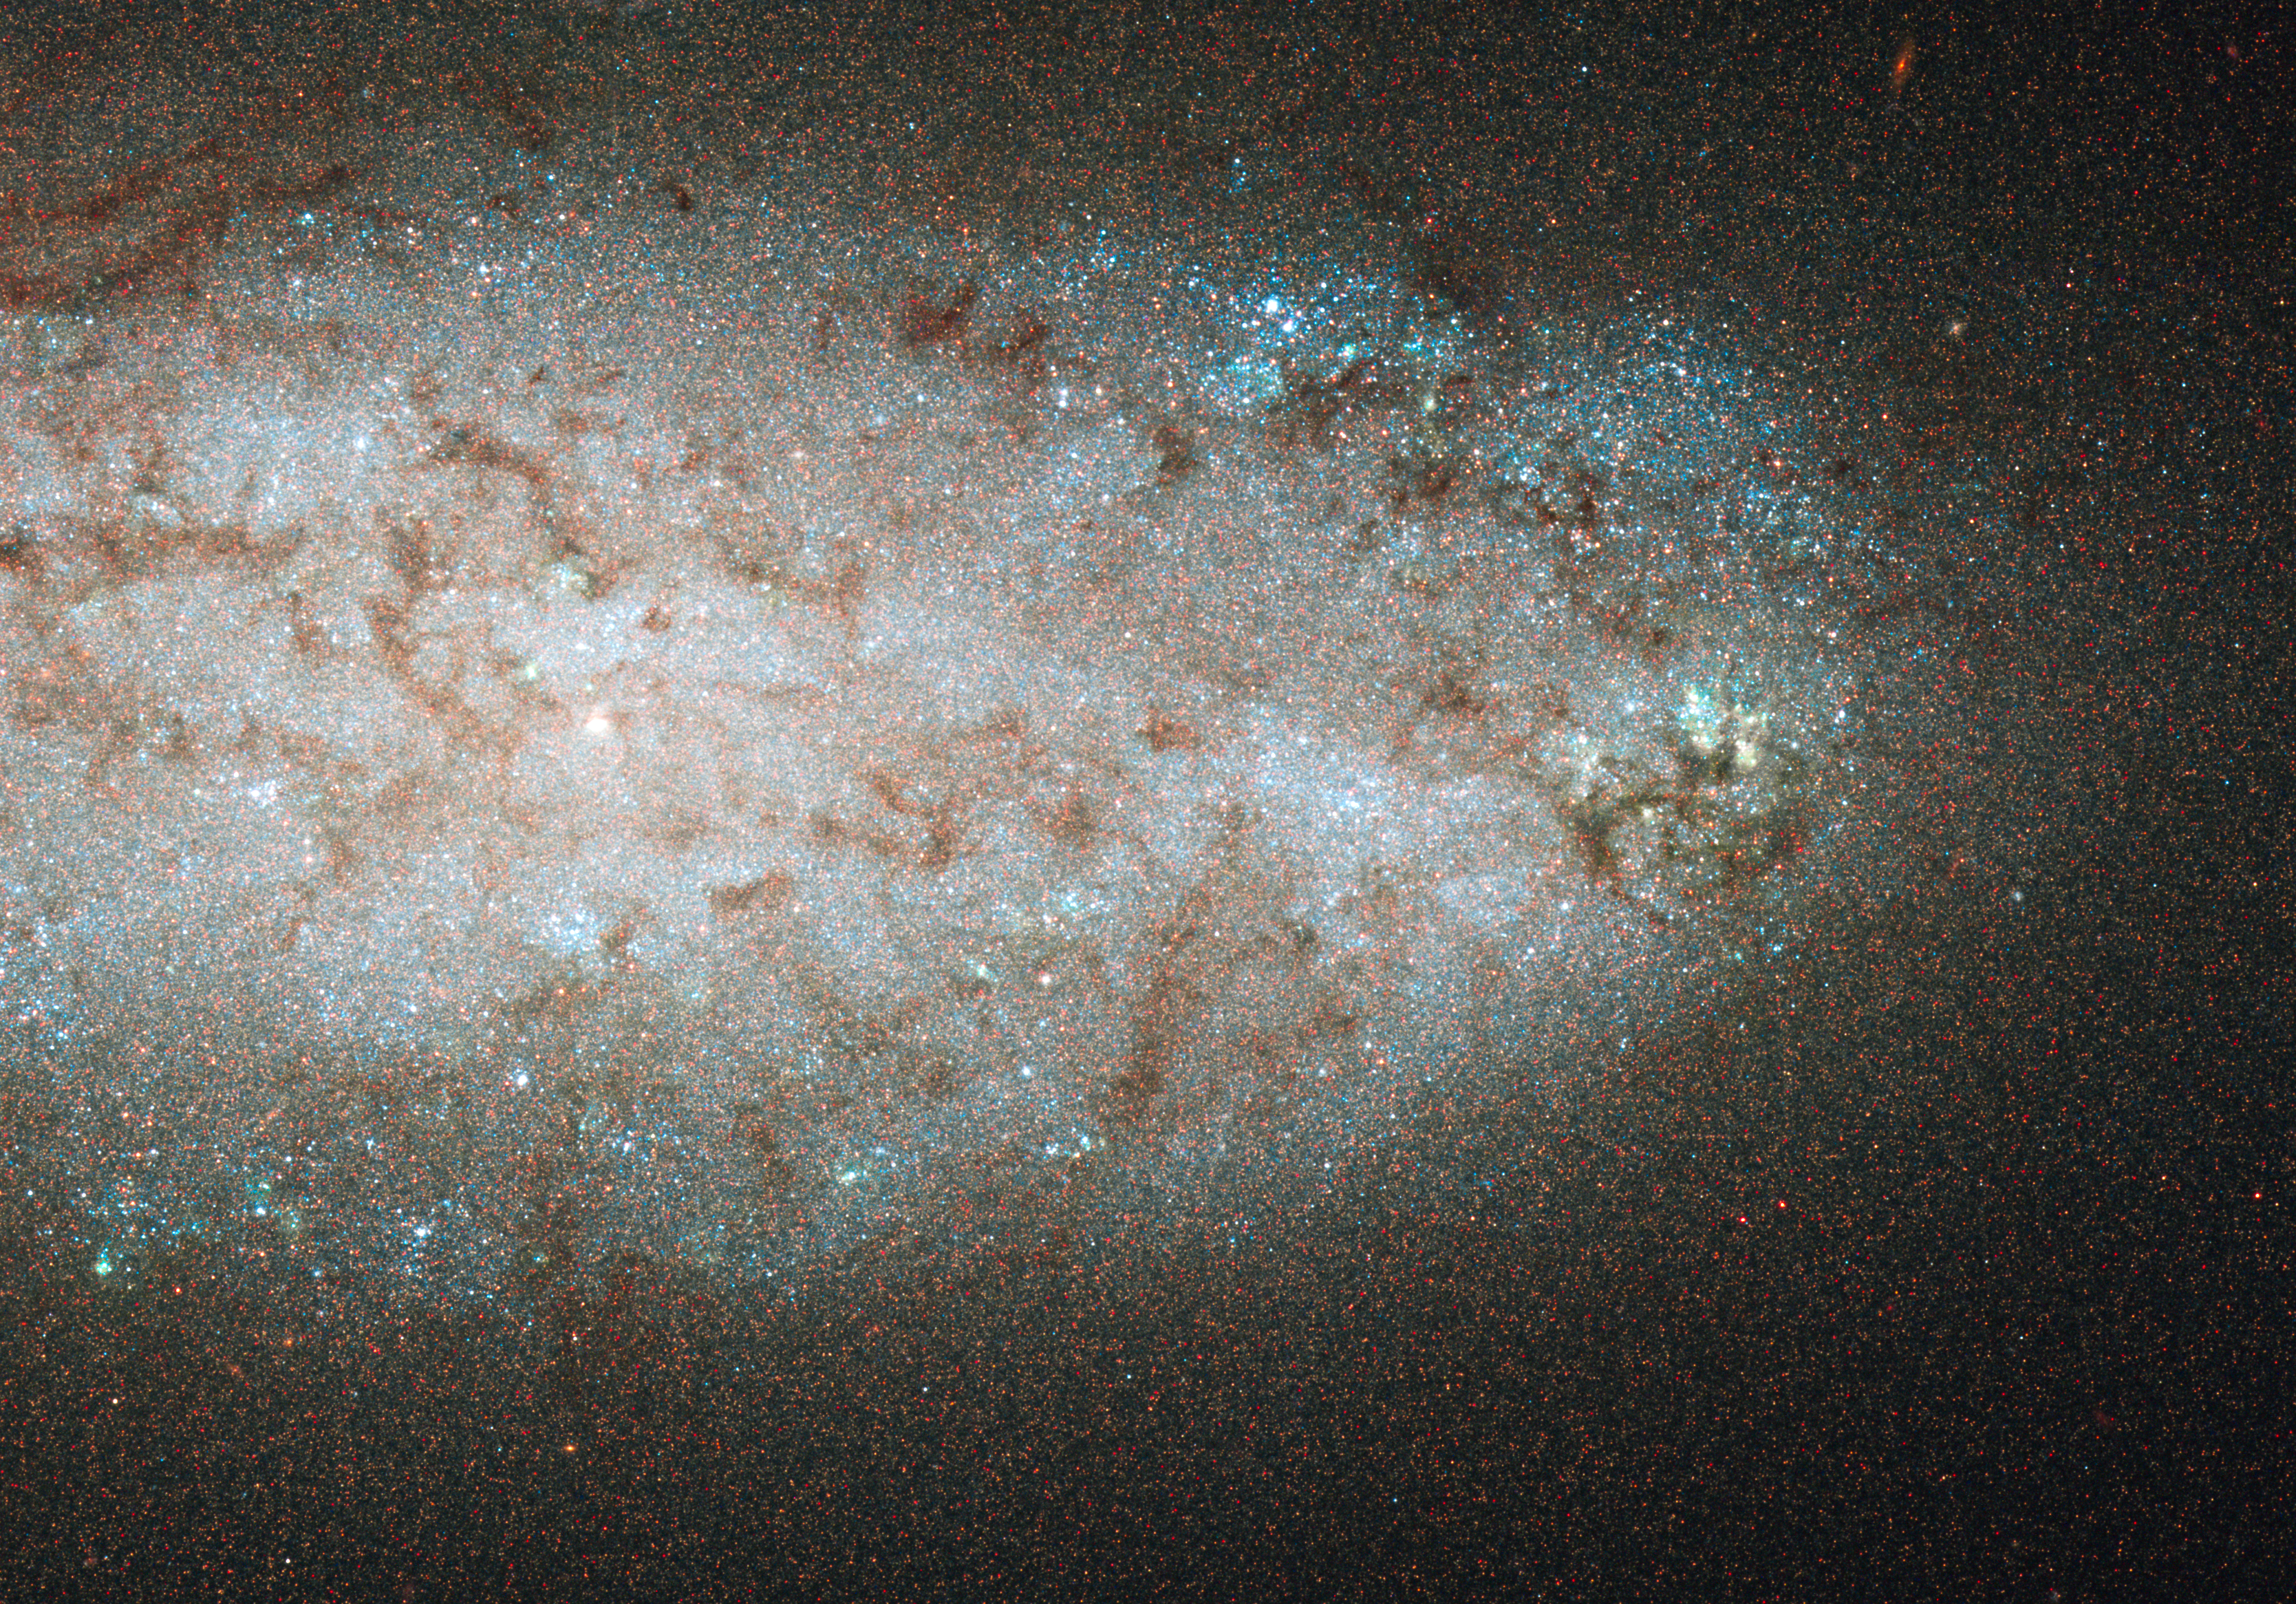

Star-birth party almost over in NGC 2976

NGC 2976 does not look like a typical spiral galaxy, as this NASA/ESA Hubble Space Telescope image shows.

In this view of the oddball galaxy's inner region, there are no obvious spiral arms. Dusty filaments running through the disc show no clear spiral structure. A raucous interaction with a neighbouring group of hefty galaxies stripped away some gas and funneled the rest to the galaxy's inner region, fueling star birth about 500 million years ago. At the same time, the galaxy's outer regions stopped making stars because the gas ran out. Now, the inner disc is almost out of gas as new stars burst to life, shrinking the star-formation region to a small area of about 5,000 light-years around the core.

Astronomers pieced together the galaxy's star-formation story with the help of Hubble's sharp vision. The galaxy's relatively close distance to Earth allowed Hubble's Advanced Camera for Surveys (ACS) to resolve hundreds of thousands of individual stars. What look like grains of sand in the image are actually single stars.

Studying the individual stars allowed astronomers to determine their colour and brightness, which provided information about when they formed. Based on this analysis, the astronomers reconstructed the star-making history for large areas of the galaxy.

The blue dots in the image are fledgling blue giant stars residing in the remaining active star-birth regions. NGC 2976 resides on the fringe of the M81 group of galaxies, located about 12 million light-years away in the constellation Ursa Major.

The observation is part of the ACS Nearby Galaxy Survey Treasury (ANGST) program. Data for the image were taken from 27 December 2006 to 10 January 2007.

Credit: NASA, ESA, and J. Dalcanton and B. Williams (University of Washington, Seattle)